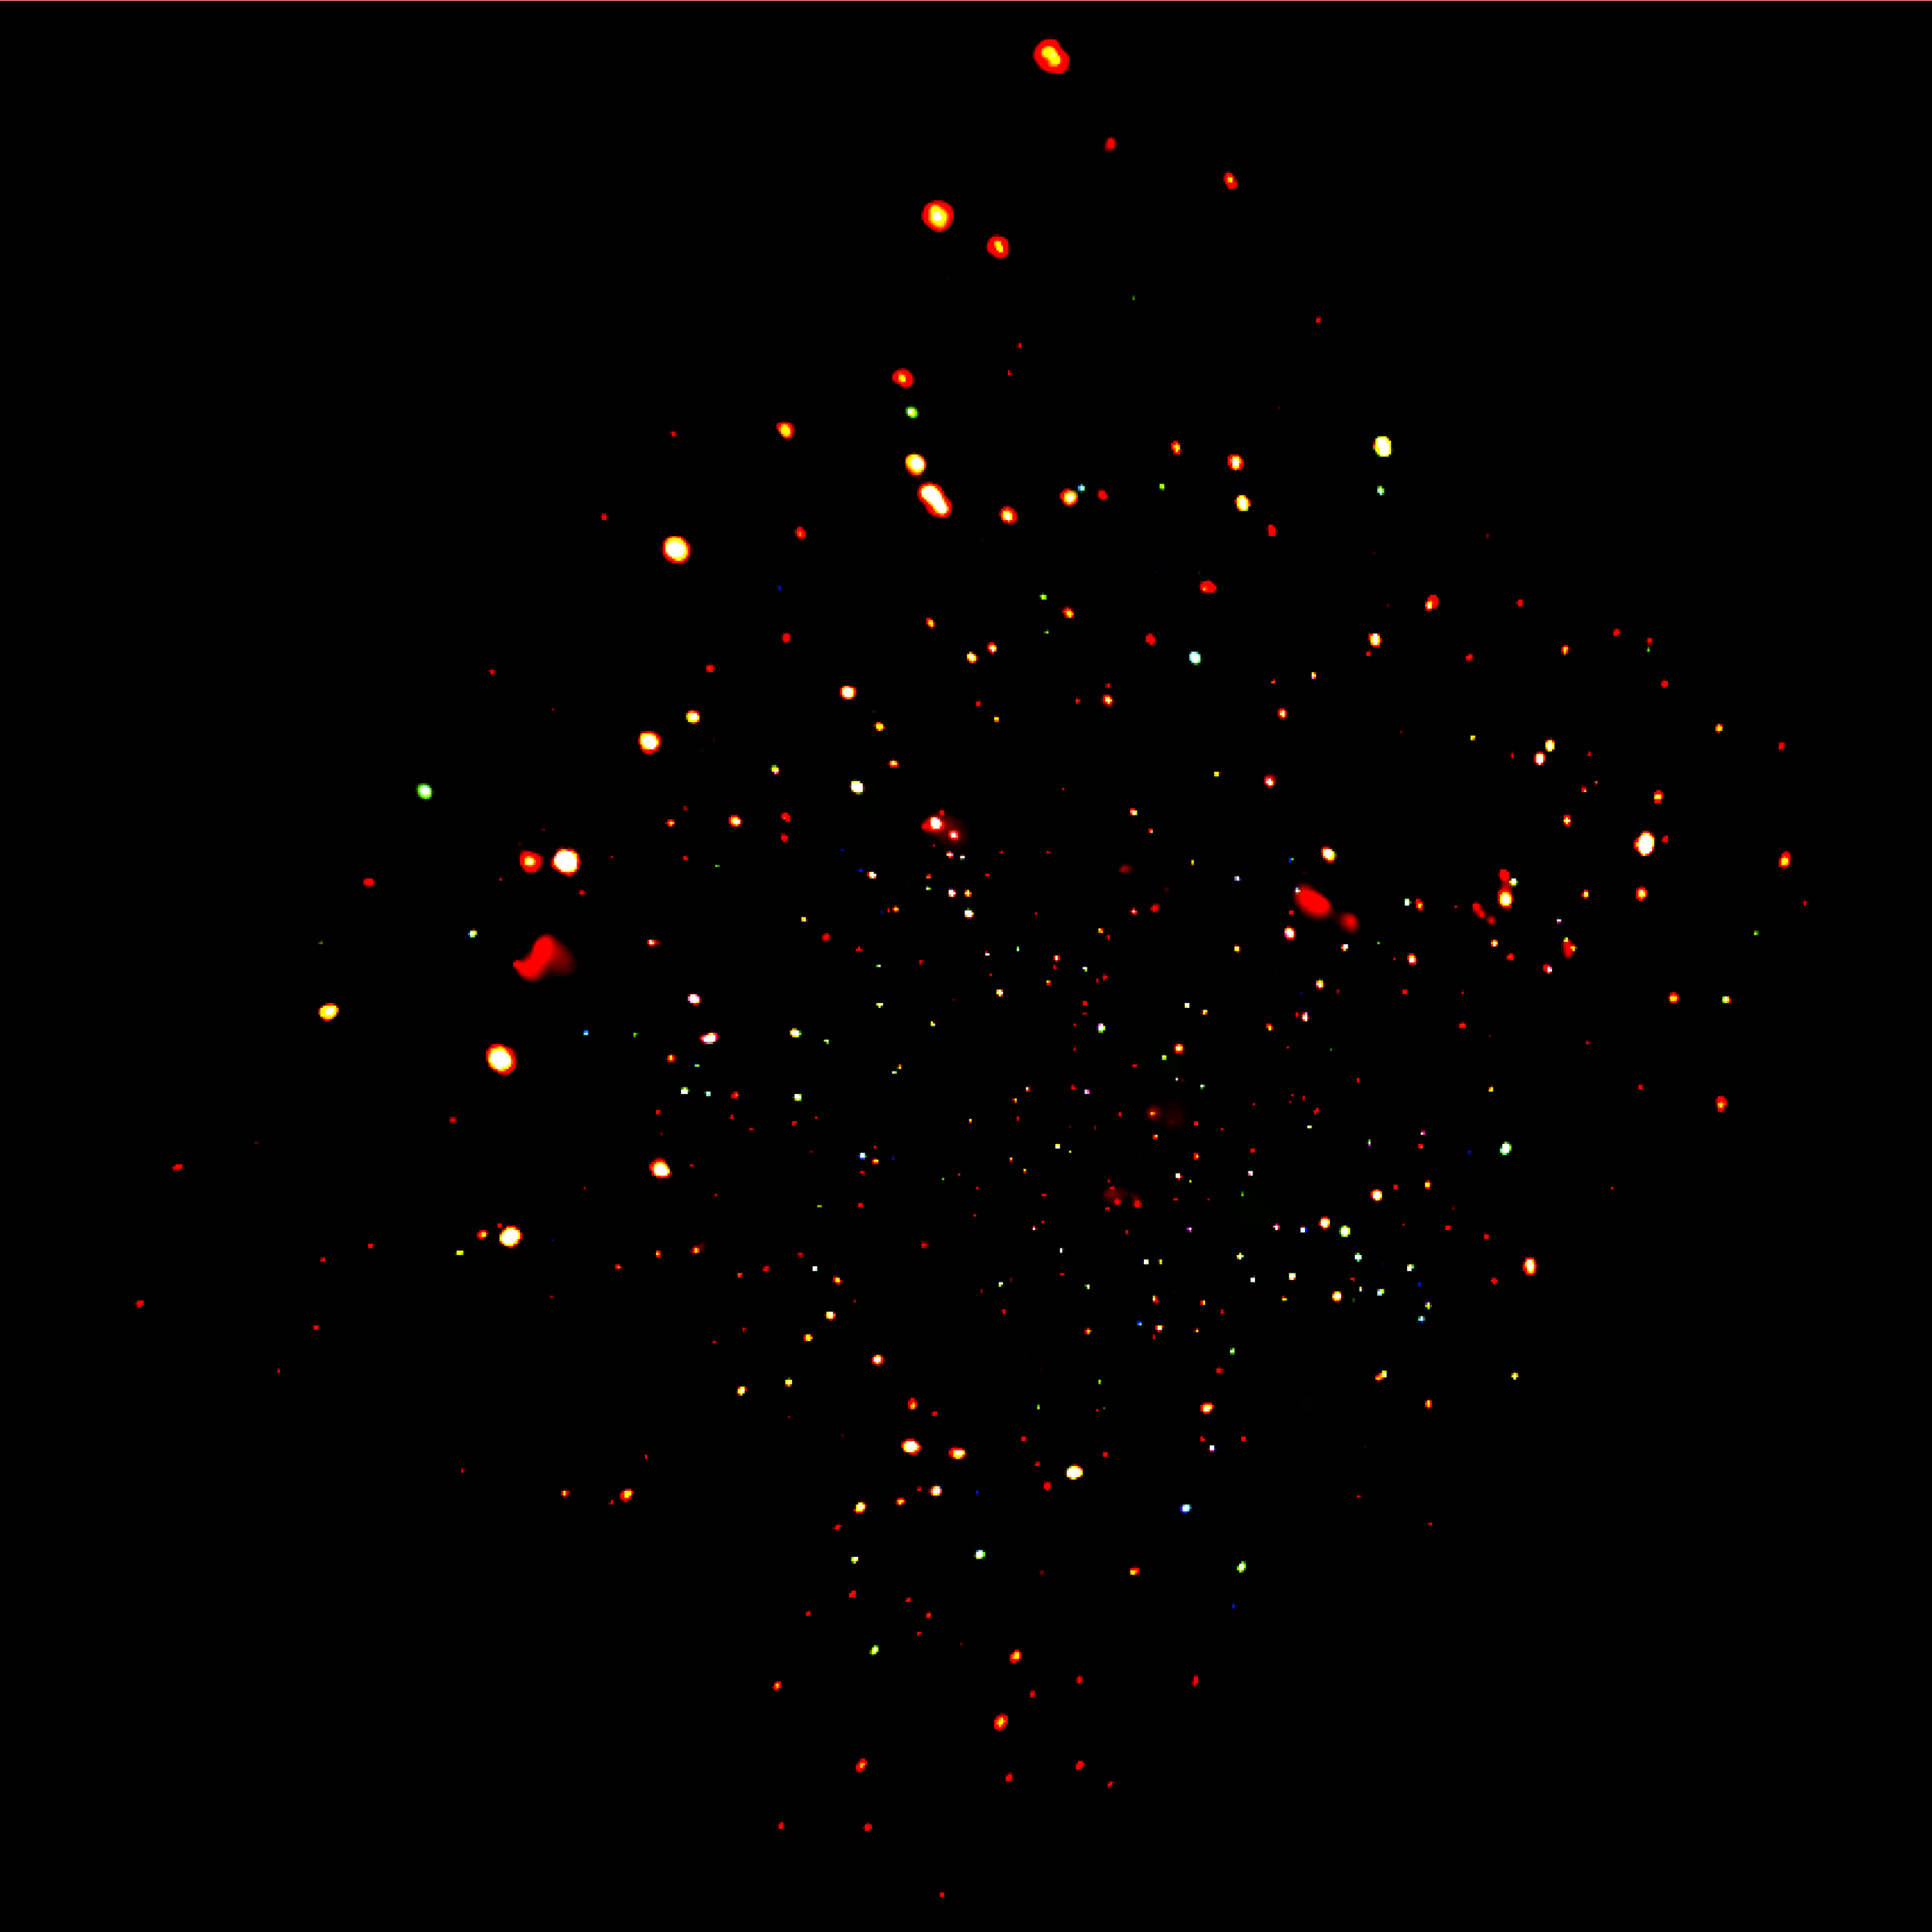

CDF-N CXO/ACIS Full Image

The Chandra Deep Field North.

Credit: NASA, ESA, the Chandra Deep Field-North Team